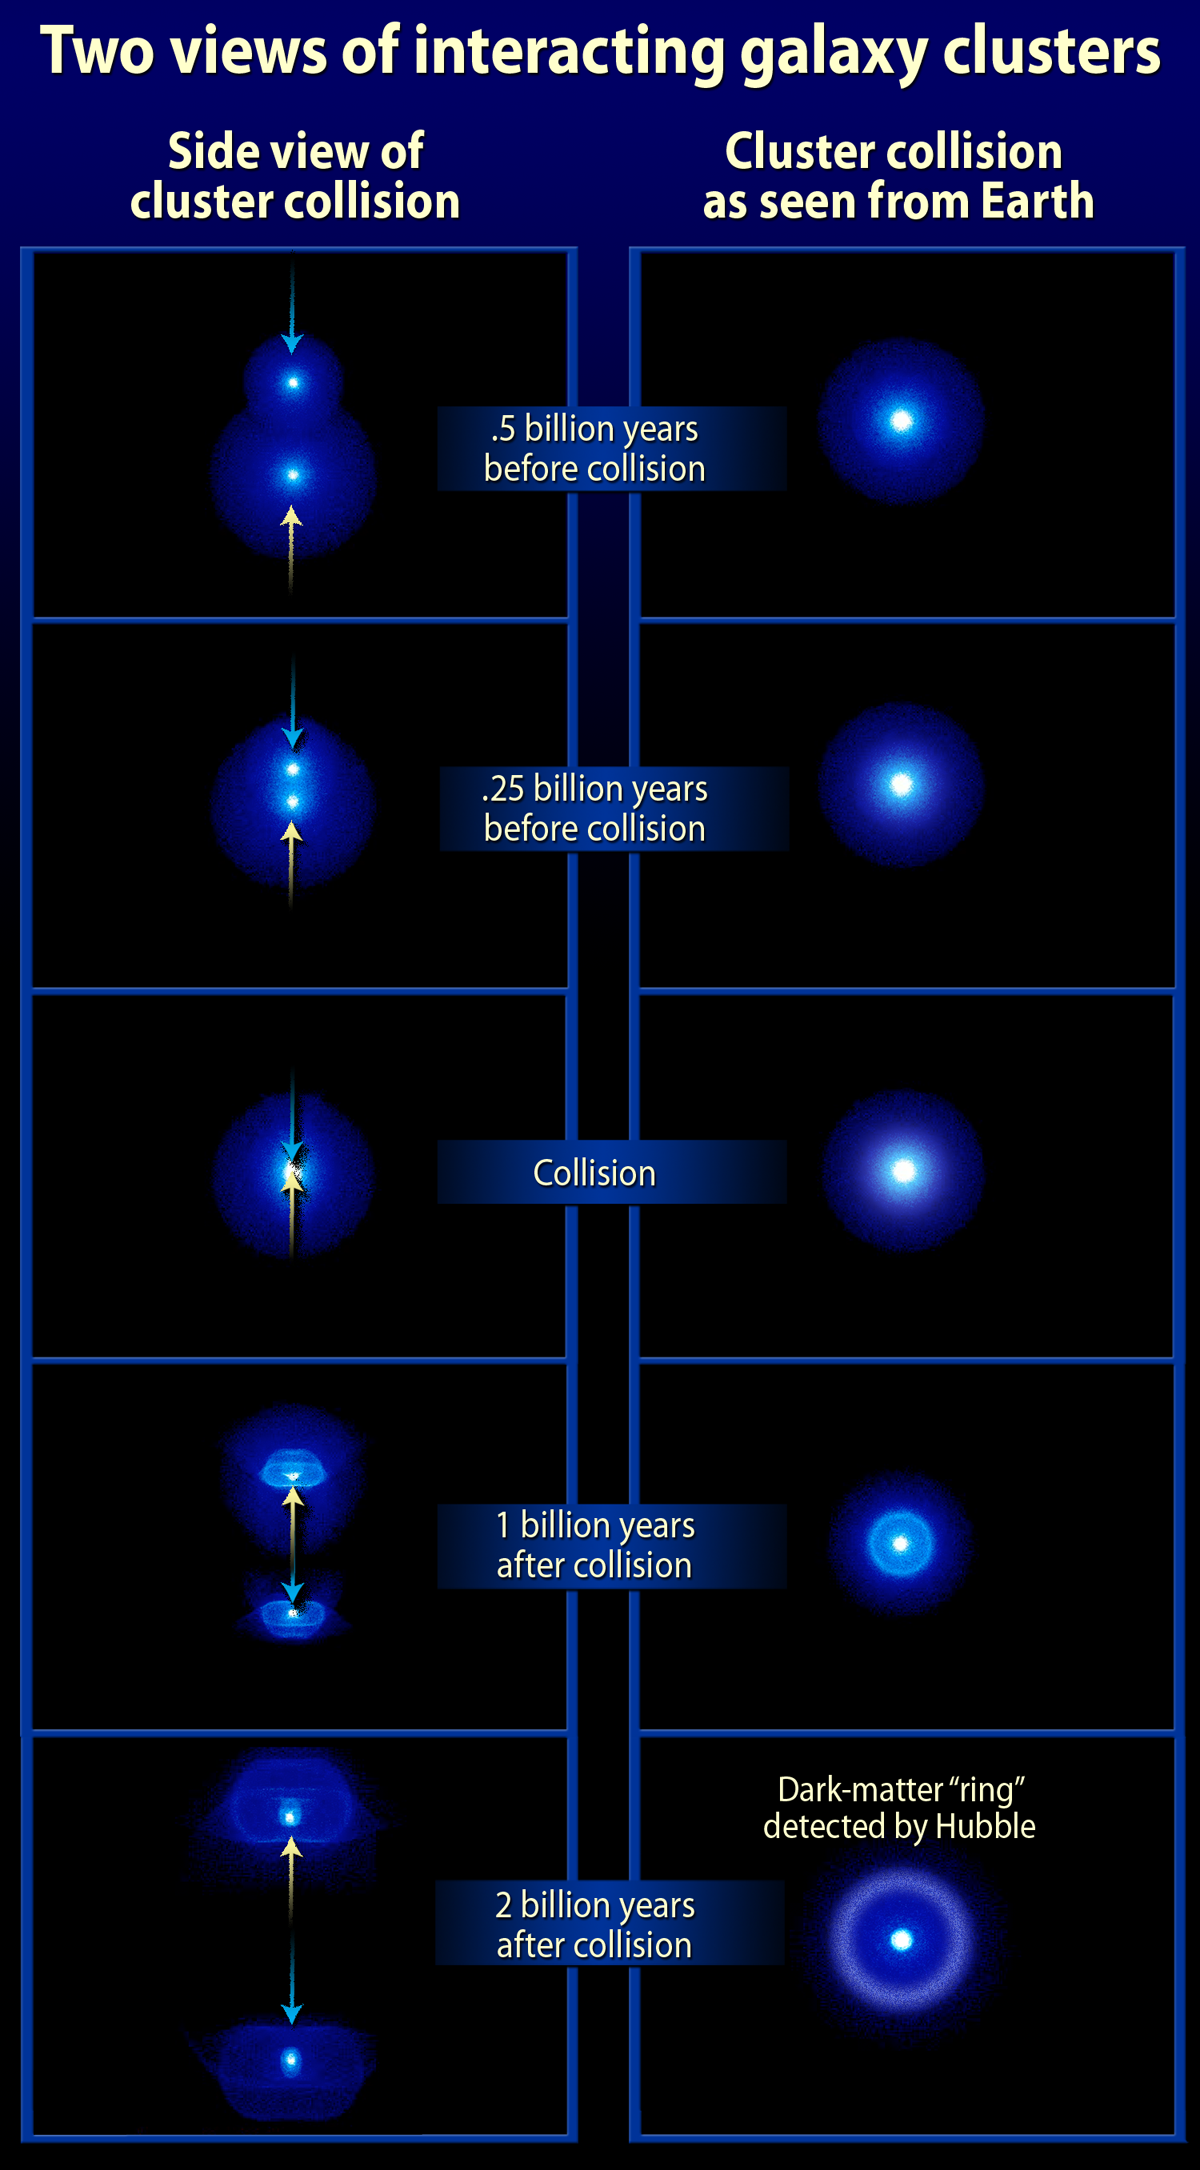

Galaxy Cluster Collision

This is a simulation showing two views of interacting galaxy clusters.

Credit: NASA, ESA, M.J. Jee and A. Feild (STScI)